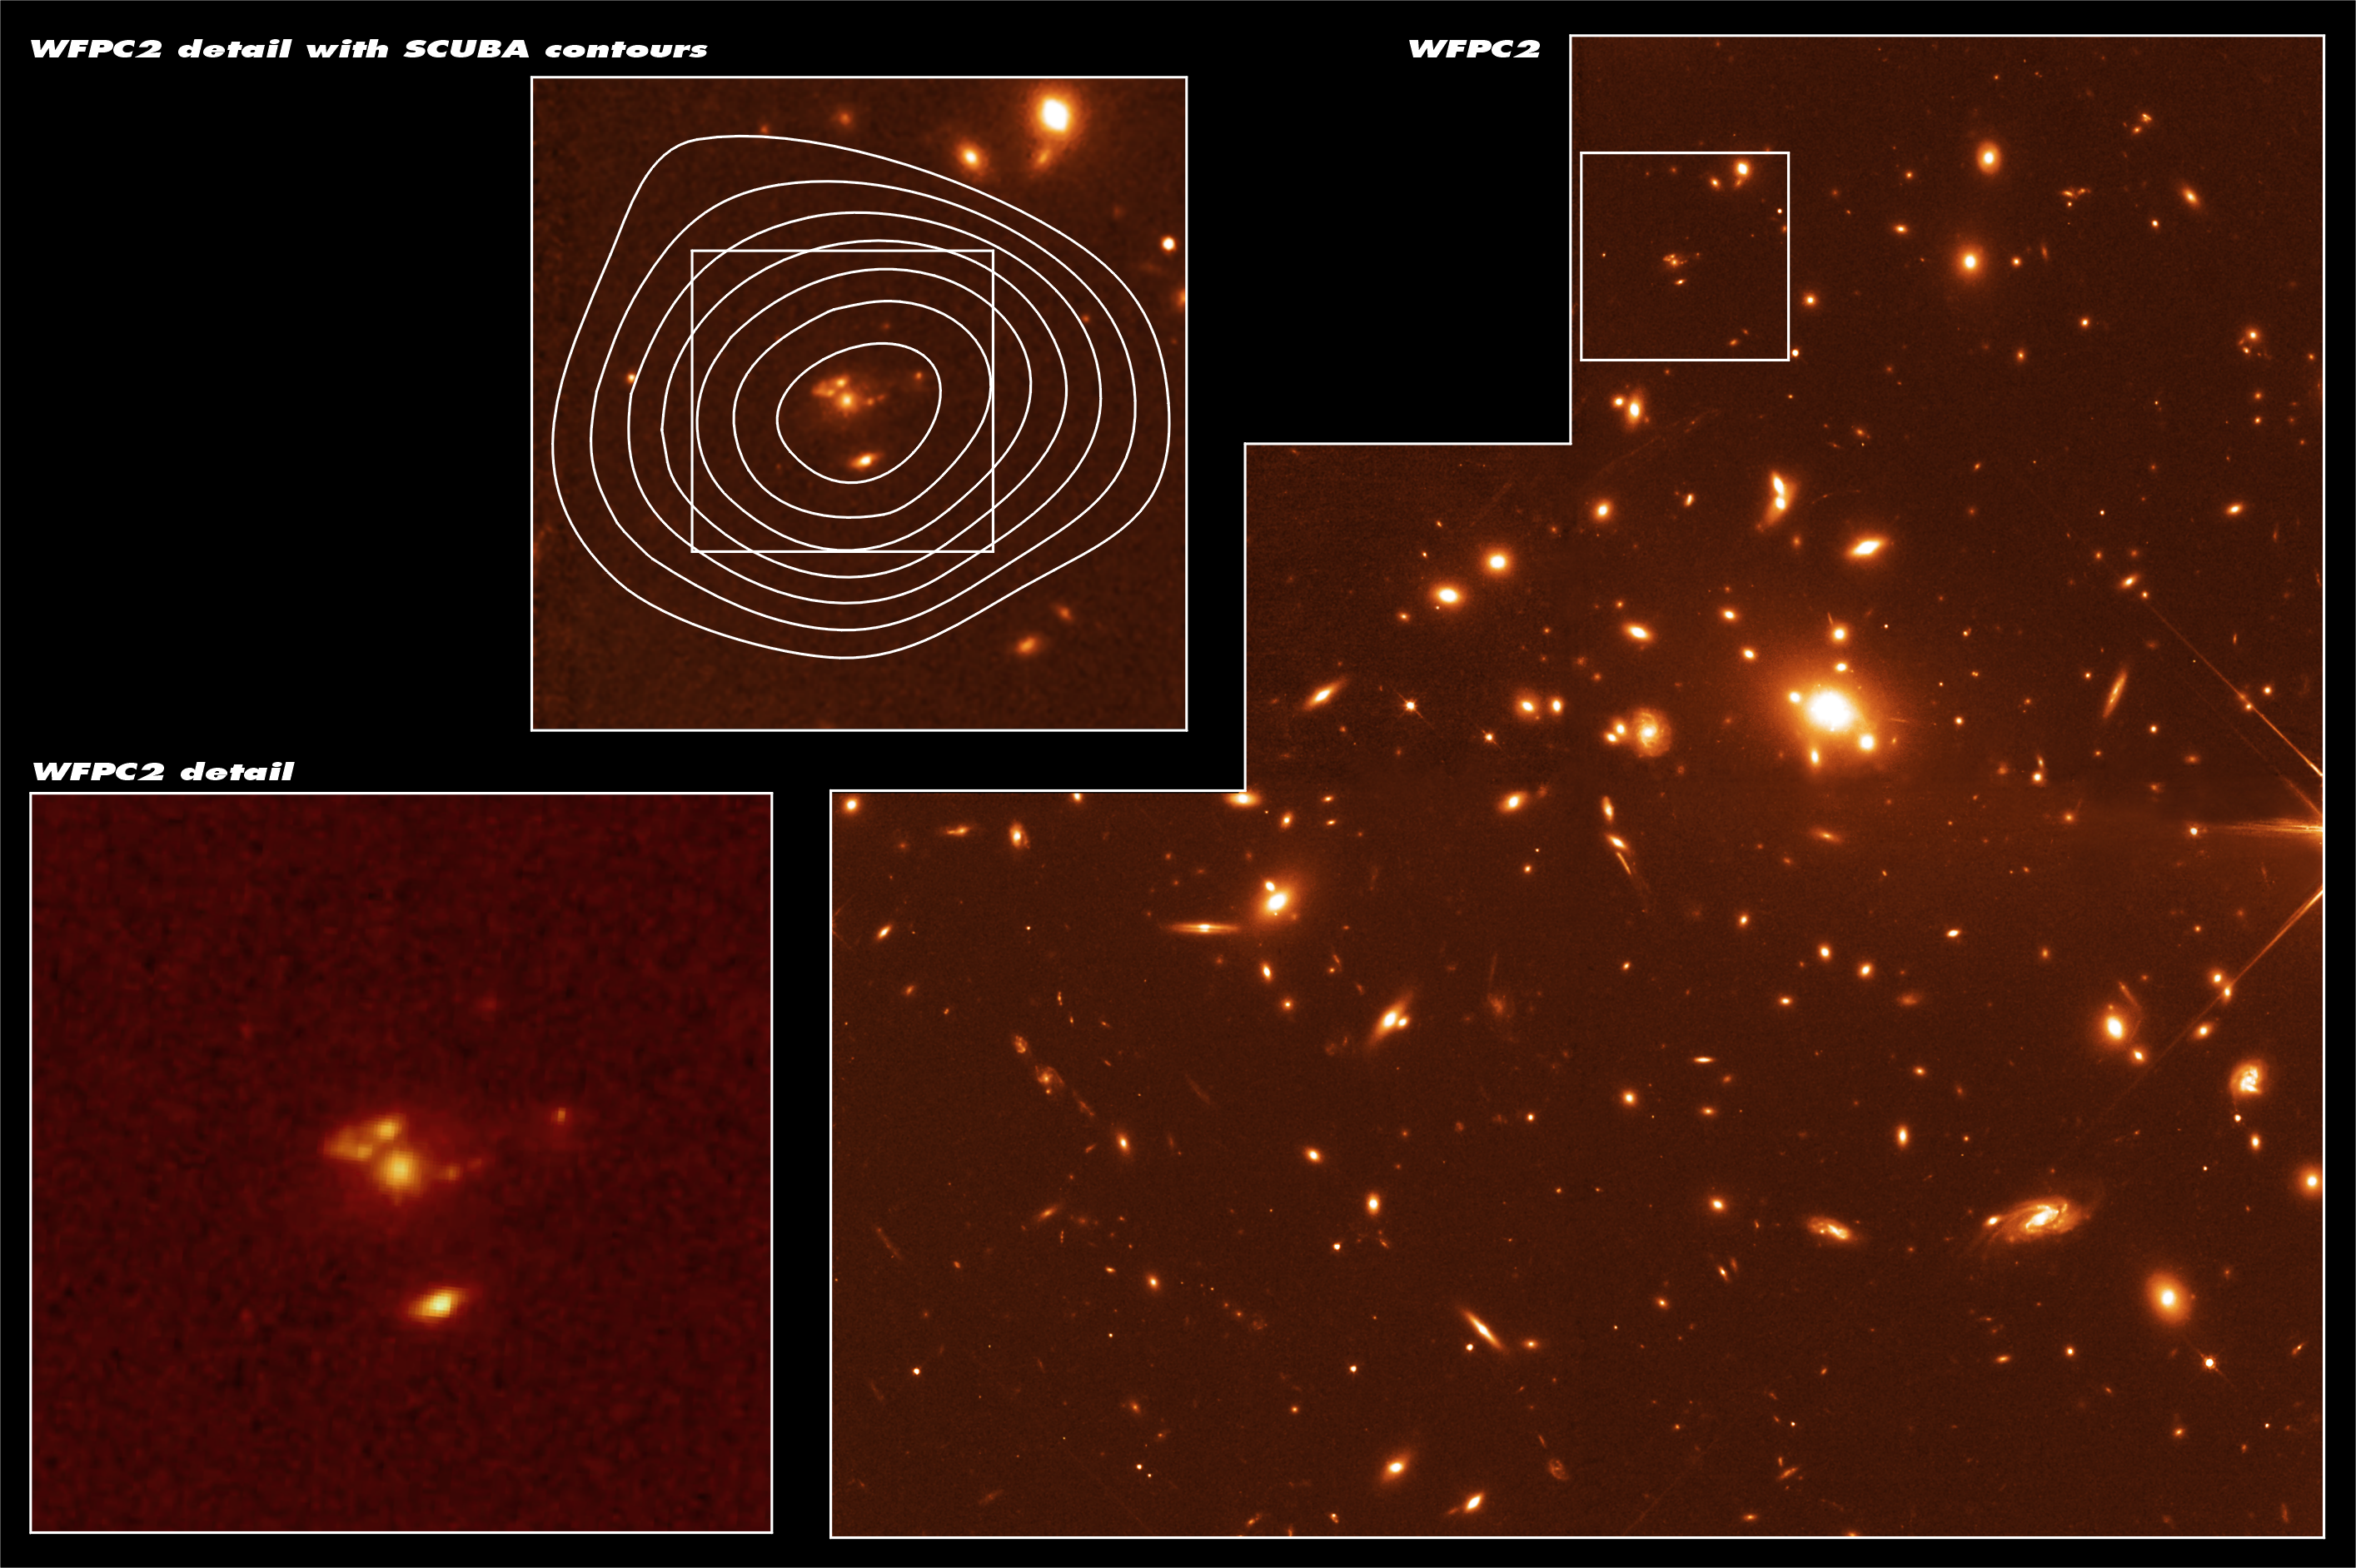

Remote Starburst Galaxy J1/J2 Lensed by Abell 1835

This NASA/ESA Hubble Space Telescope image was taken with the Wide Field and Planetary Camera 2 (WFPC2) in red light. The two hour exposure spans 2.5 arcminutes. The image shows an overview of the massive galaxy cluster Abell 1835 (right) which is acting as a gravitational telescope enhancing the light from background galaxies. The galaxy cluster is at a distance of 3.5 billion light years and numerous gravitational arcs can be seen in the image. In the centre of the cluster a massive giant elliptical galaxy is surrounded by several smaller ellipticals. The inserts show detailed views of the galaxy SMM J14011+0252, also called J1/J2, which was first observed with the SCUBA (Sub-millimetre Common User Bolometer Array) instrument on the James Clerk Maxwell Telescope in Hawaii. SCUBA intensity contours are shown on the image in the middle. This galaxy belongs to an enigmatic 'hidden' population of galaxies in the early Universe. A group of European and American astronomers led by Jean-Paul Kneib has used Hubble and the gravitational amplification of the galaxy cluster to make the first observation of one of these distant massively star-forming 'dusty' galaxies revealed in the process of formation. The two components of the galaxy, J1 (centered) and J2 (below), are only separated by 50, 000 light years, but have quite different structure. J1 is redder and shows complex structure - very different than optically selected galaxies seen at the same epoch. J2 is bluer and is very compact. Most of the dust emission detected with SCUBA is likely to come from J1. The finest details in J1 are less than 1, 000 light years large - when corrected for the distortions due to the gravitational lens. For further information, please click the news release link below.

Credit: ESA & Jean-Paul Kneib (Observatoire Midi-Pyrénées)